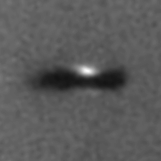

Edge-on protoplanetary disc in the Orion Nebula

Resembling an interstellar Frisbee, this is a disk of dust seen edge-on around a newborn star in the Orion nebula, located 1, 500 light-years away. Because the disk is edge-on, the star is largely hidden inside, in this striking Hubble Space Telescope picture. The disk may be an embryonic planetary system in the making. Our solar system probably formed out of just such a disk 4.5 billion years ago. At 17 times the diameter of our own solar system, this disk is the largest of several recently discovered in the Orion nebula.

The left image is a three-color composite, taken in blue, green, and red emission lines from glowing gas in the nebula.

Credit: Mark McCaughrean (Max-Planck-Institute for Astronomy), C. Robert O'Dell (Rice University), and NASA/ESA